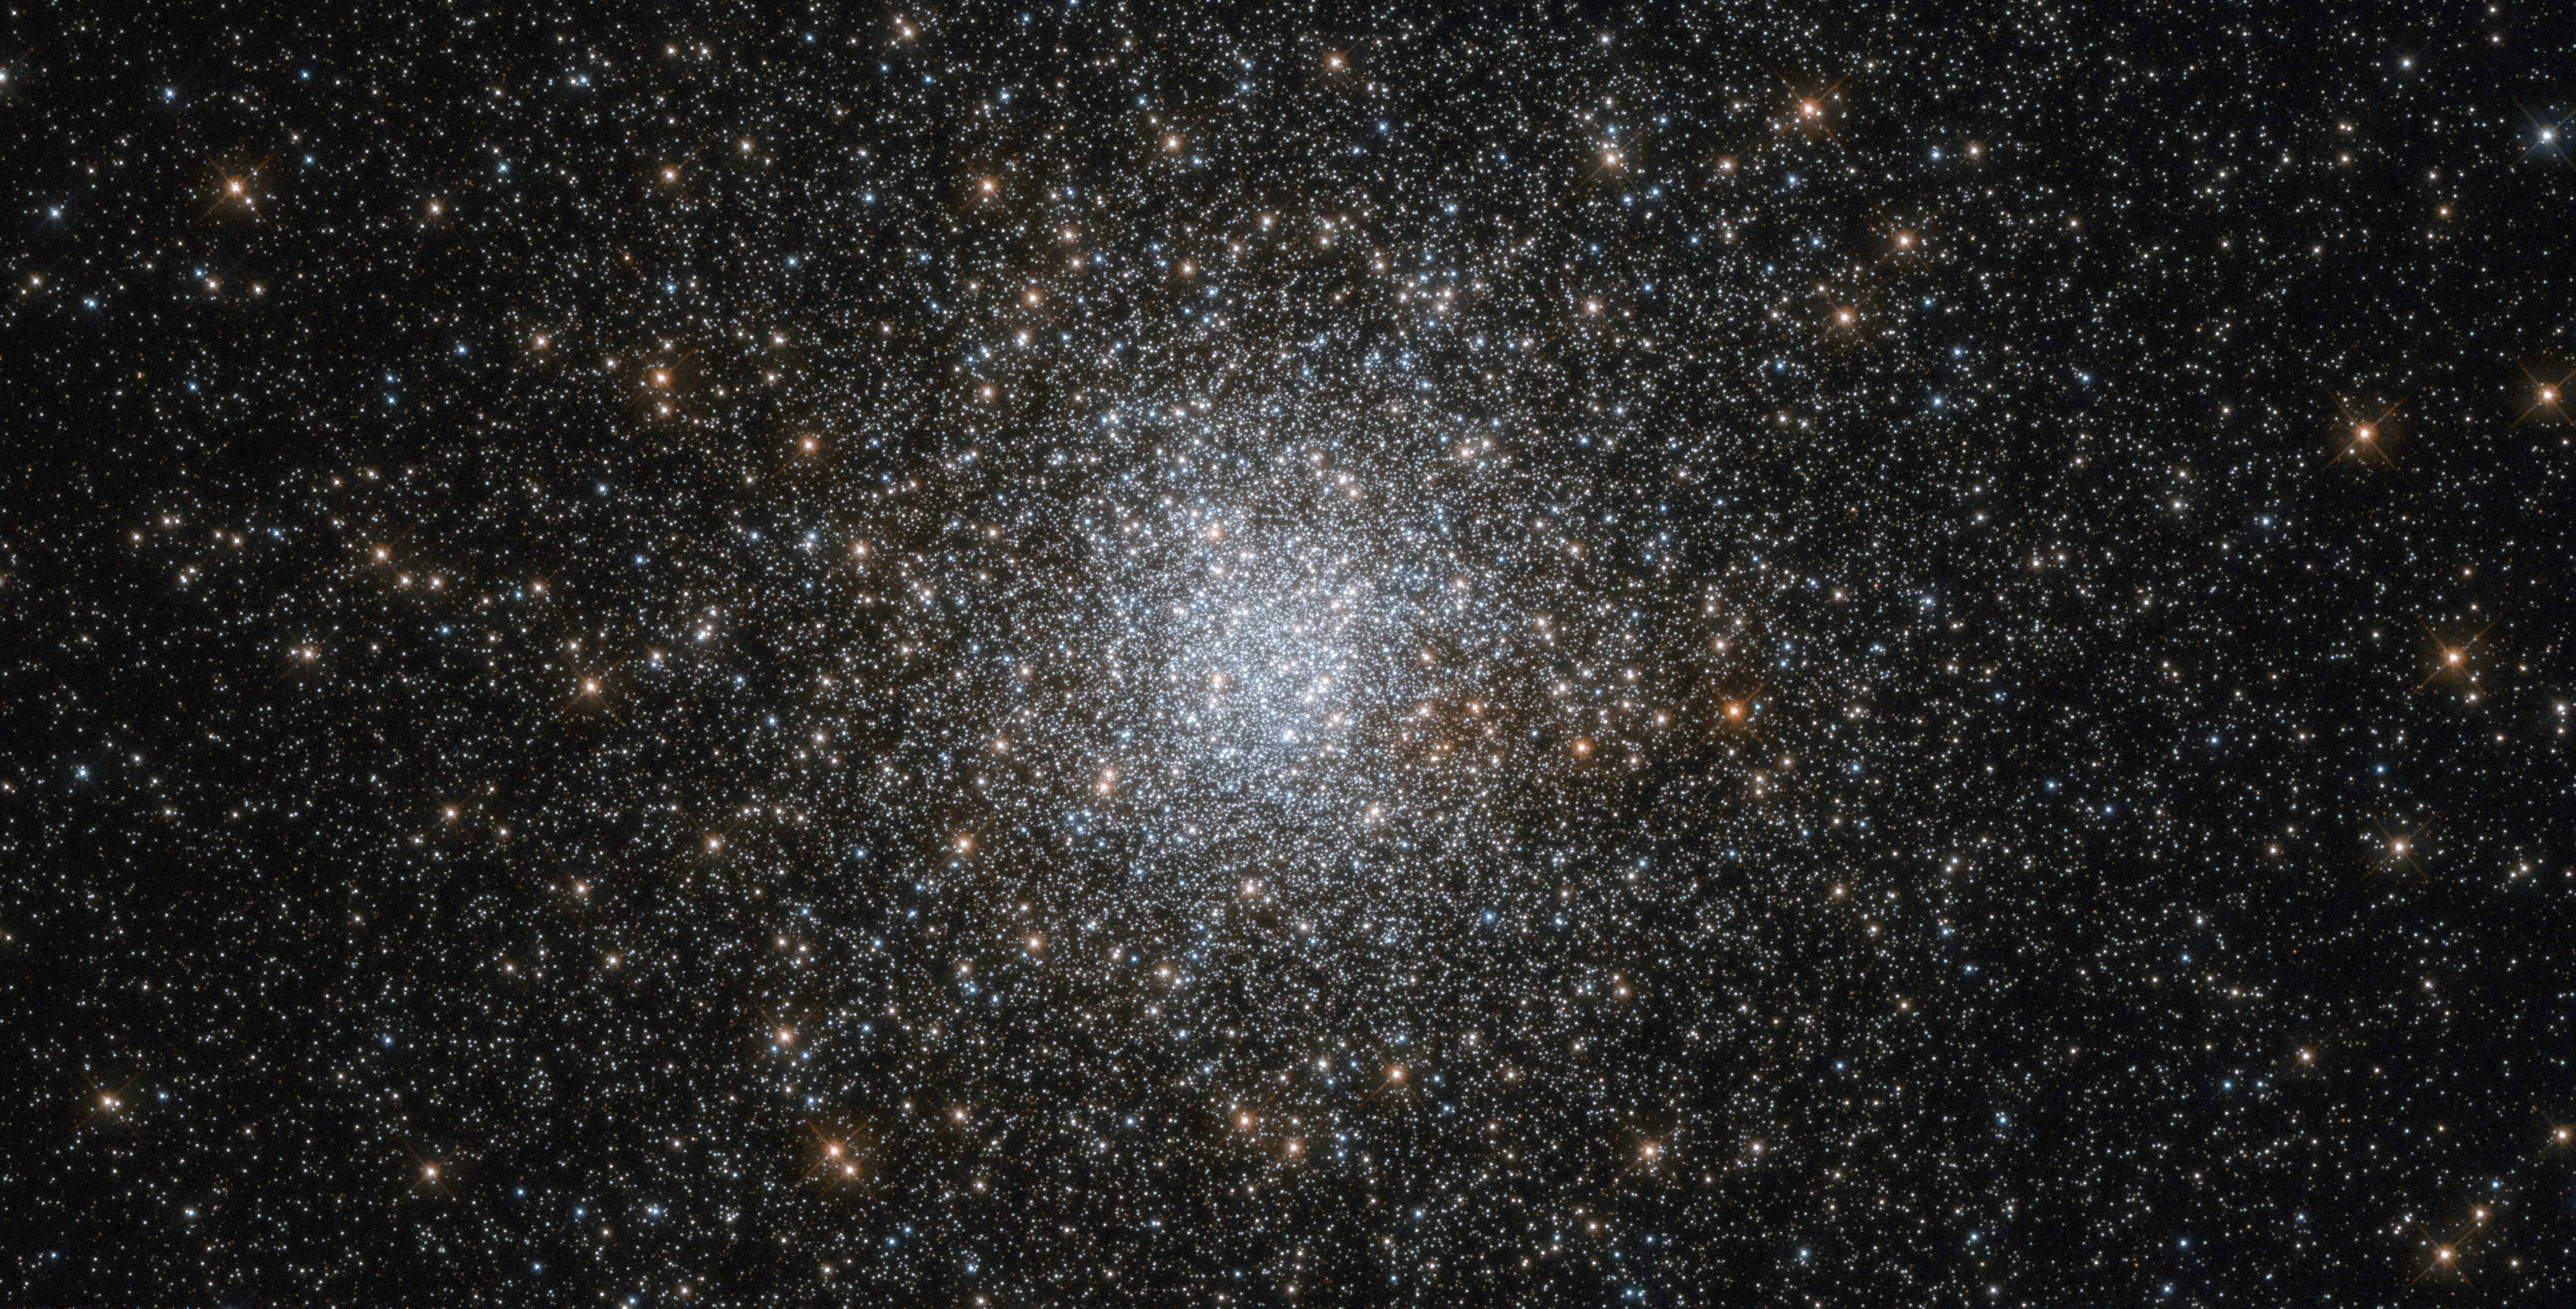

An aging beauty

This rich and dense smattering of stars is a massive globular cluster, a gravitationally-bound collection of stars that orbits the Milky Way. Globular clusters are denser and more spherical than open star clusters like the famous Pleiades. They typically contain hundreds of thousands of stars that are thought to have formed at roughly the same time.

Studies have shown that this globular cluster, named NGC 6139, is home to an aging population of stars. Most globular clusters orbiting the Milky Way are estimated to be over 10 billion years old; as a result they contain some of the oldest stars in our galaxy, formed very early in the galaxy’s history. However, their role in galactic evolution is still a matter of study.

This cluster is seen roughly in the direction of the centre of the Milky Way, in the constellation of Scorpius (The Scorpion). This constellation is a goldmine of fascinating astronomical objects. Hubble has set its sights on Scorpius many times to observe objects such as the butterfly-like Bug Nebula, surprising binary star systems, and other dazzling globular clusters.

Credit: ESA/Hubble & NASA